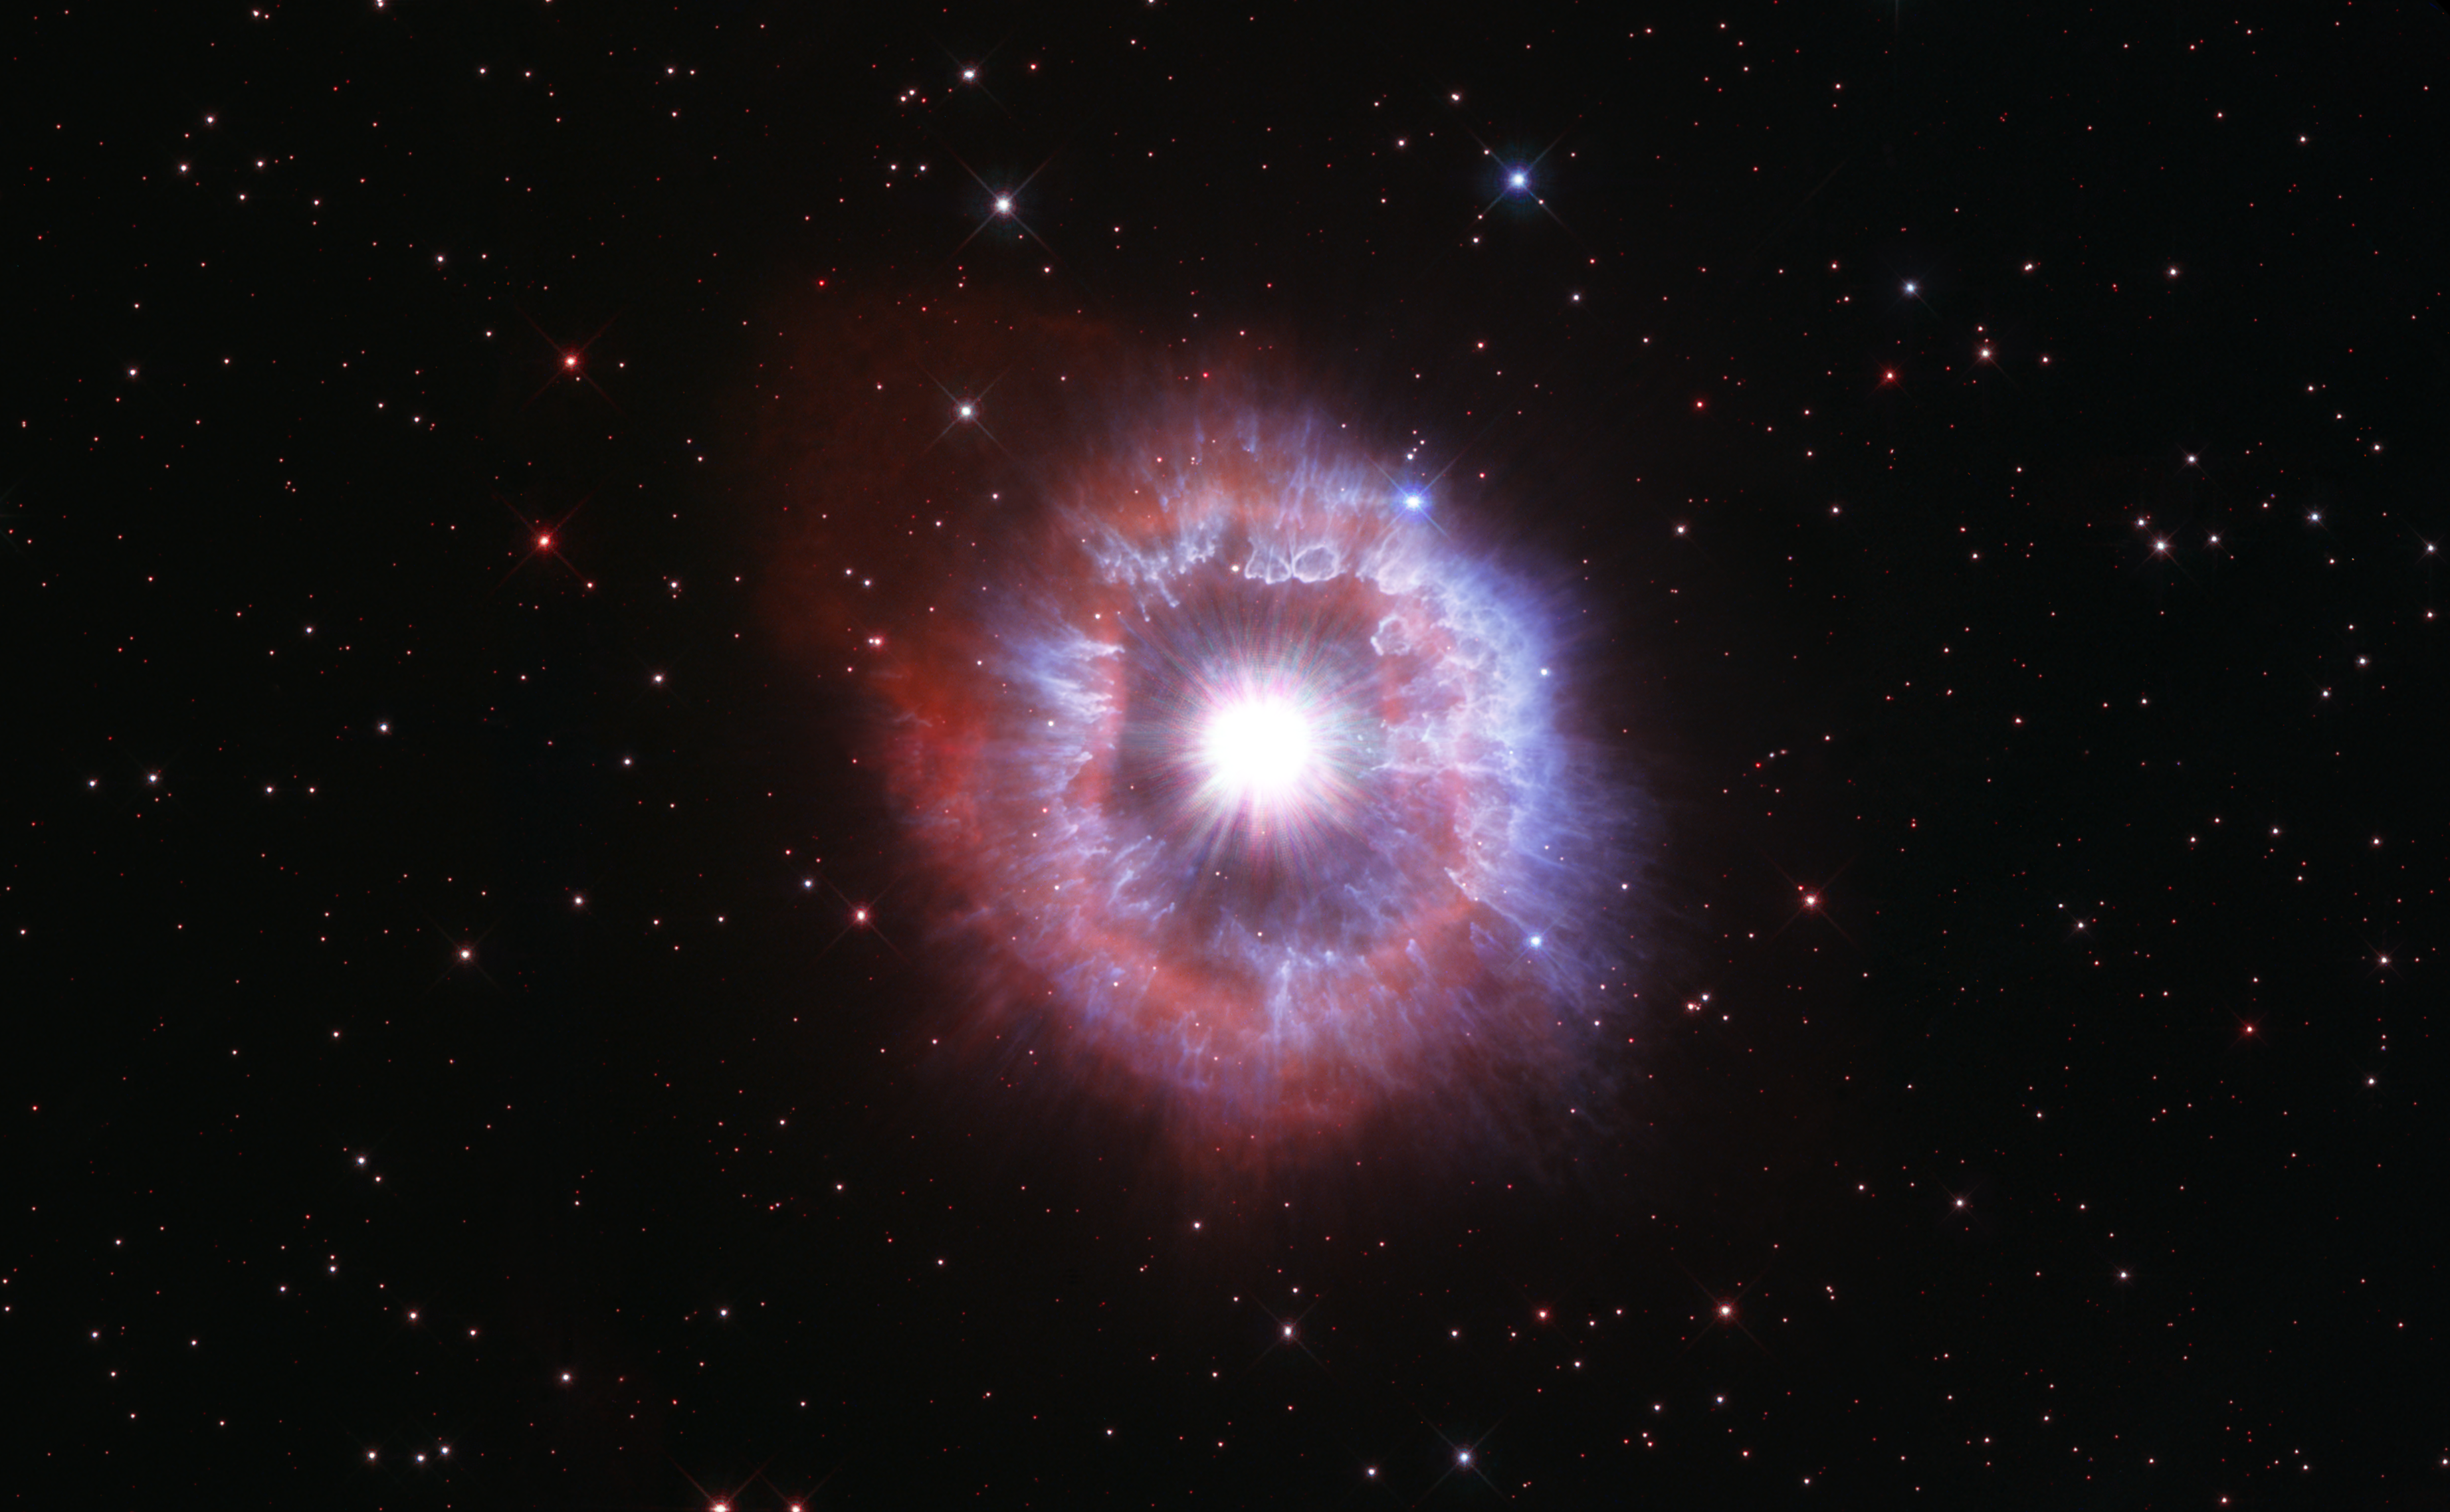

Hubble Celebrates its 31st anniversary with a magnificent view of AG Carinae

In celebration of the 31st anniversary of the launch of the NASA/ESA Hubble Space Telescope, astronomers aimed the celebrated observatory at one of the brightest stars seen in our galaxy to capture its beauty.

The giant star featured in this latest Hubble Space Telescope anniversary image is waging a tug-of-war between gravity and radiation to avoid self-destruction. The star, called AG Carinae, is surrounded by an expanding shell of gas and dust. The nebula is about five light-years wide, which equals the distance from here to our nearest star, Alpha Centauri.

Credit: NASA, ESA and STScI